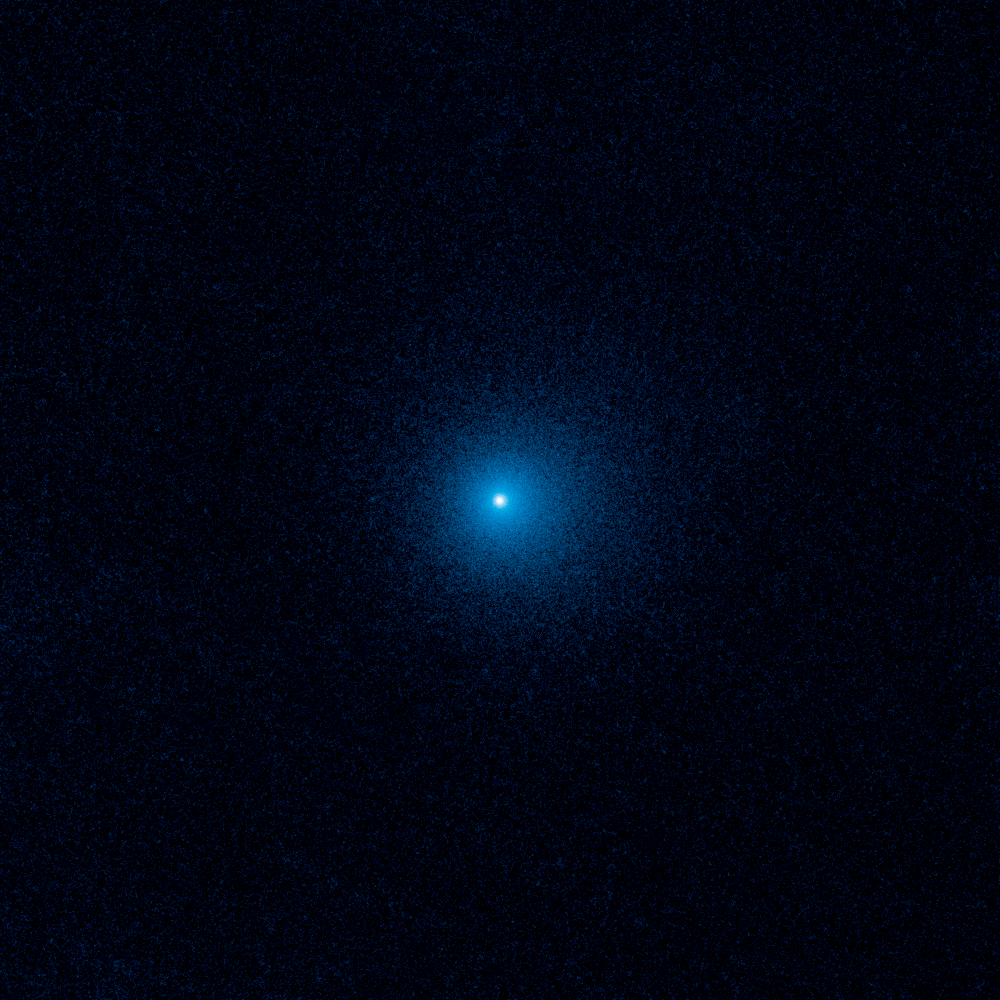

Distant active comet C/2017 K2

This Hubble Space Telescope image shows a fuzzy cloud of dust, called a coma, surrounding the comet C/2017 K2 PANSTARRS (K2), the farthest active comet ever observed entering the solar system. Hubble snapped images of K2 when the frozen visitor was over 2.4 billion kilometres from the Sun, just beyond Saturn's orbit. Even at that remote distance, sunlight is warming the frigid comet, producing a 128,000-kilometre-wide coma that envelops a tiny, solid nucleus. K2 has been traveling for millions of years from its home in the Oort Cloud, a spherical region at the edge of our solar system. This frigid area contains hundreds of billions of comets, the icy leftovers from the formation of the solar system 4.6 billion years ago. The image was taken in June 2017 by Hubble's Wide Field Camera 3.

Credit: NASA, ESA, and D. Jewitt (UCLA)